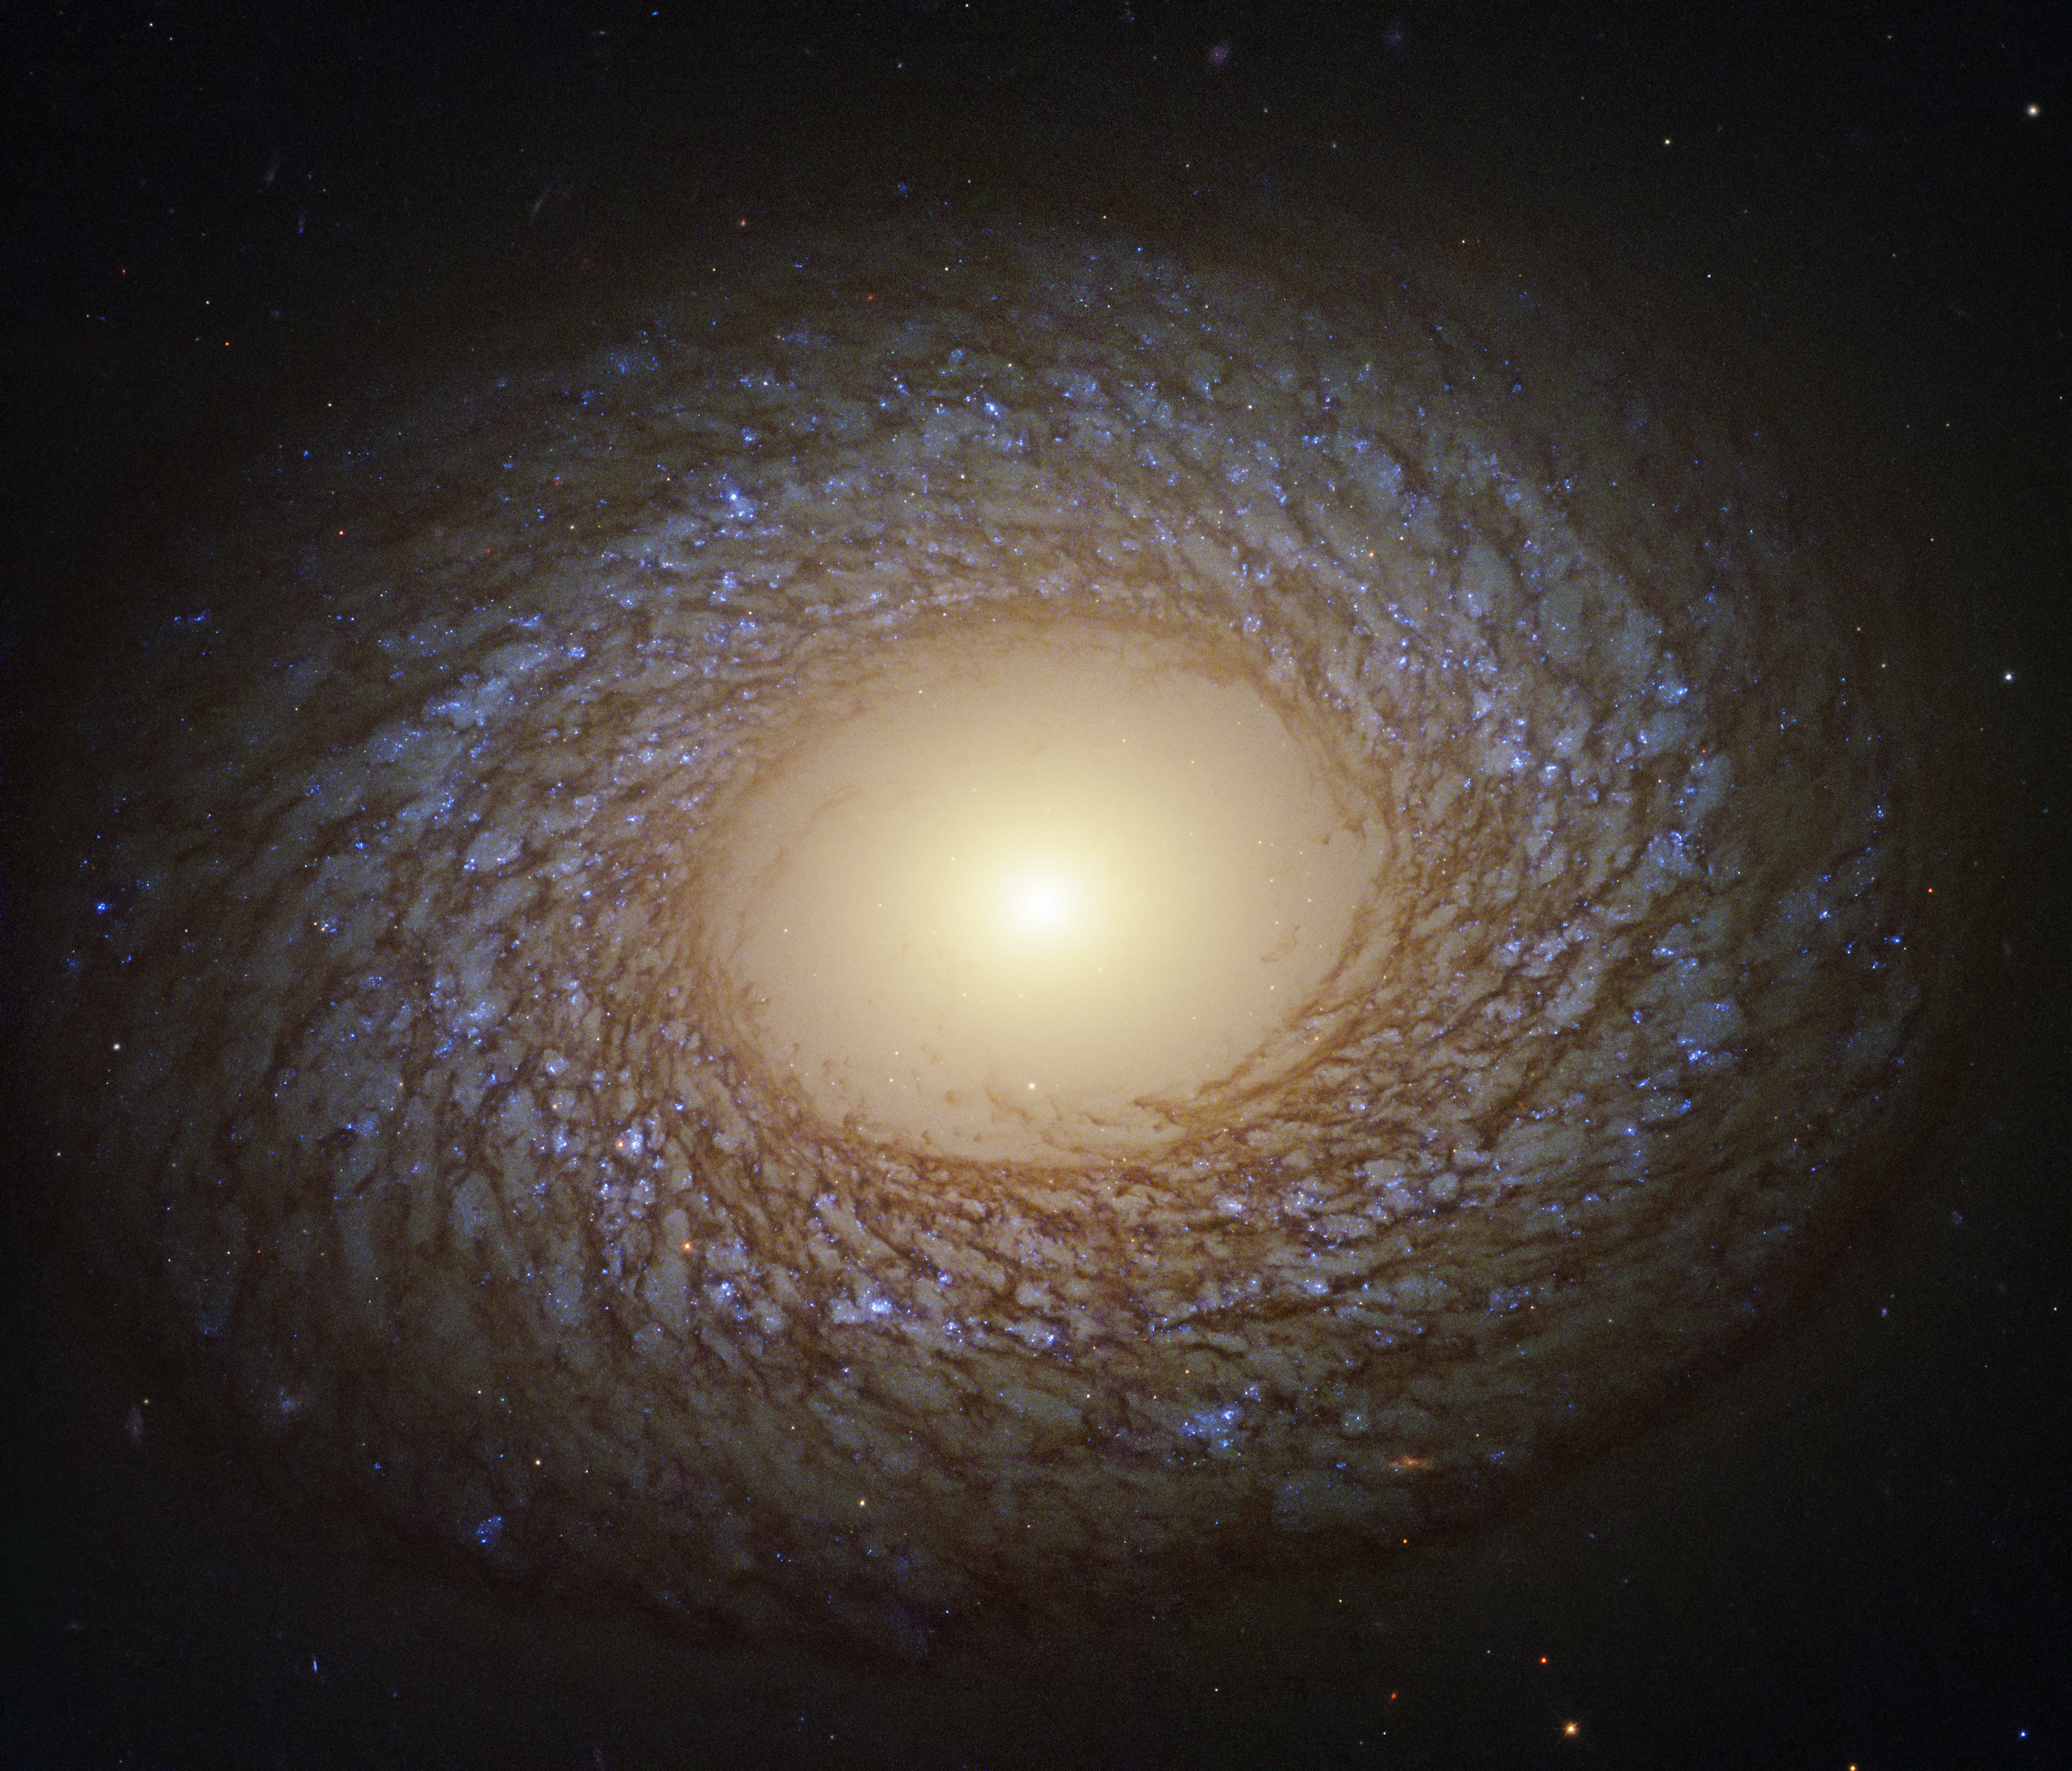

Birds of a Feather

The spiral pattern shown by the galaxy in this image from the NASA/ESA Hubble Space Telescope is striking because of its delicate, feathery nature. These "flocculent" spiral arms indicate that the recent history of star formation of the galaxy, known as NGC 2775, has been relatively quiet. There is virtually no star formation in the central part of the galaxy, which is dominated by an unusually large and relatively empty galactic bulge, where all the gas was converted into stars long ago.

NGC 2775 is classified as a flocculent spiral galaxy, located 67 million light-years away in the constellation of Cancer.

Millions of bright, young, blue stars shine in the complex, feather-like spiral arms, interlaced with dark lanes of dust. Complexes of these hot, blue stars are thought to trigger star formation in nearby gas clouds. The overall feather-like spiral patterns of the arms are then formed by shearing of the gas clouds as the galaxy rotates. The spiral nature of flocculents stands in contrast to the grand design spirals, which have prominent, well defined-spiral arms.

Credit: ESA/Hubble & NASA, J. Lee and the PHANGS-HST Team Acknowledgement: Judy Schmidt (Geckzilla)